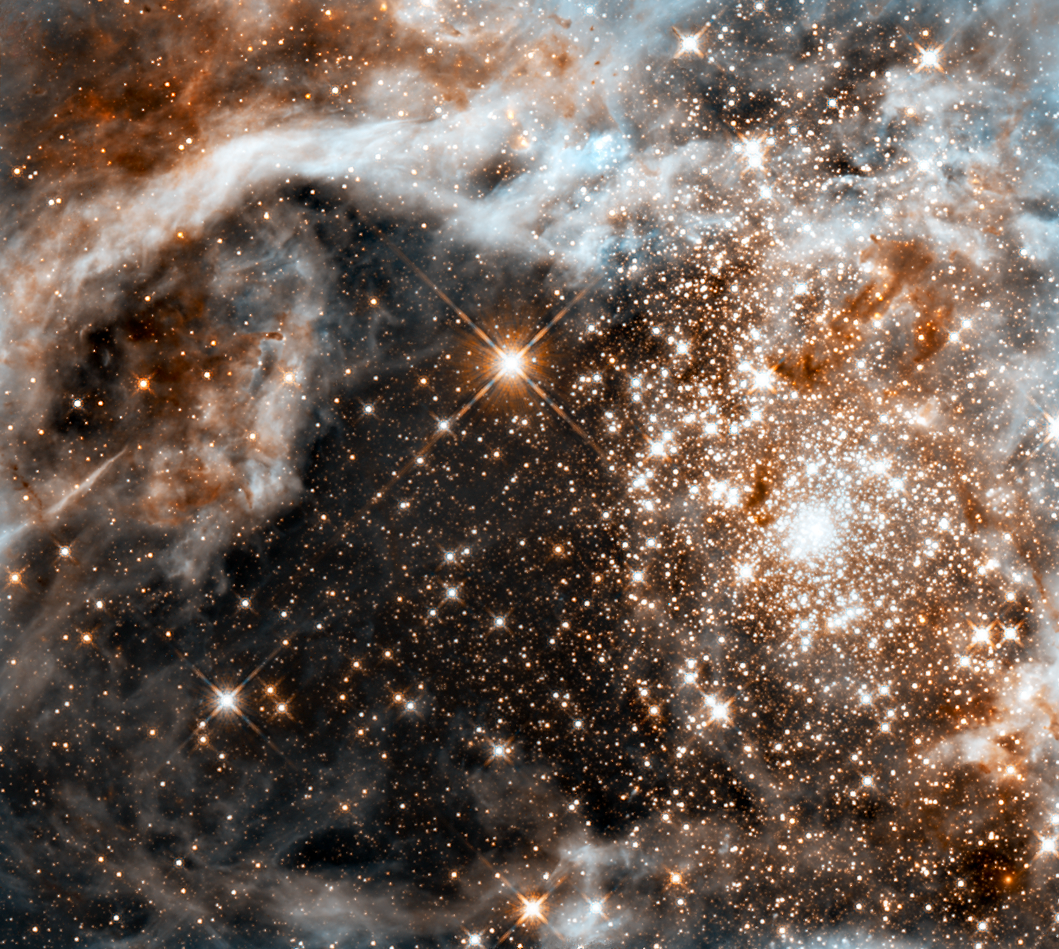

Hubble observes the Large Magellanic Cloud's Star-Forming Region, 30 Doradus

The massive, young stellar grouping, called R136, is only a few million years old and resides in the 30 Doradus Nebula, a turbulent star-birth region in the Large Magellanic Cloud (LMC), a satellite galaxy of our Milky Way. Many of the stars are among the most massive known. Several of them are over 100 times more massive than our Sun. These hefty stars are destined to become supernovae in a few million years.

The image, taken by Hubble's Wide Field Camera 3, spans about 100 light-years. The nebula is close enough to Earth that Hubble can resolve individual stars, giving astronomers important information about the stars' birth and evolution.

The brilliant stars are carving deep cavities in the surrounding material by unleashing a torrent of ultraviolet light, and hurricane-force stellar winds (streams of charged particles), which are etching away the enveloping hydrogen gas cloud in which the stars were born. The image reveals a fantasy landscape of pillars, ridges, and valleys, as well as a dark region in the center that roughly looks like the outline of a holiday tree. Besides sculpting the gaseous terrain, the brilliant stars can also help create a successive generation of offspring. When the winds hit dense walls of gas, they create shocks, which may be generating a new wave of star birth.

The movement of the LMC around the Milky Way may have triggered the massive cluster's formation in several ways. The gravitational tug of the Milky Way and the companion Small Magellanic Cloud may have compressed gas in the LMC. Also, the pressure resulting from the LMC plowing through the Milky Way's halo may have compressed gas in the satellite. The cluster is a rare, nearby example of the many super star clusters that formed in the distant, early universe, when star birth and galaxy interactions were more frequent. Previous Hubble observations have shown astronomers that super star clusters in faraway galaxies are ubiquitous. The LMC is located 170,000 light-years away and is a member of the Local Group of Galaxies, which also includes the Milky Way.

The Hubble image was taken at infrared wavelengths (1.1 microns and 1.6 microns). Hubble sees through the dusty nebula, revealing many stars that cannot be seen in visible light. The large bright star just above the center of the image is in the 30 Doradus nebula. The Hubble observations of 30 Doradus were made October 20-27, 2009.

Credit: NASA, ESA, and F. Paresce (INAF-IASF, Bologna, Italy), R. O'Connell (University of Virginia, Charlottesville), the Wide Field Camera 3 Science Oversight Committee, and the Hubble Heritage Team (STScI/AURA)